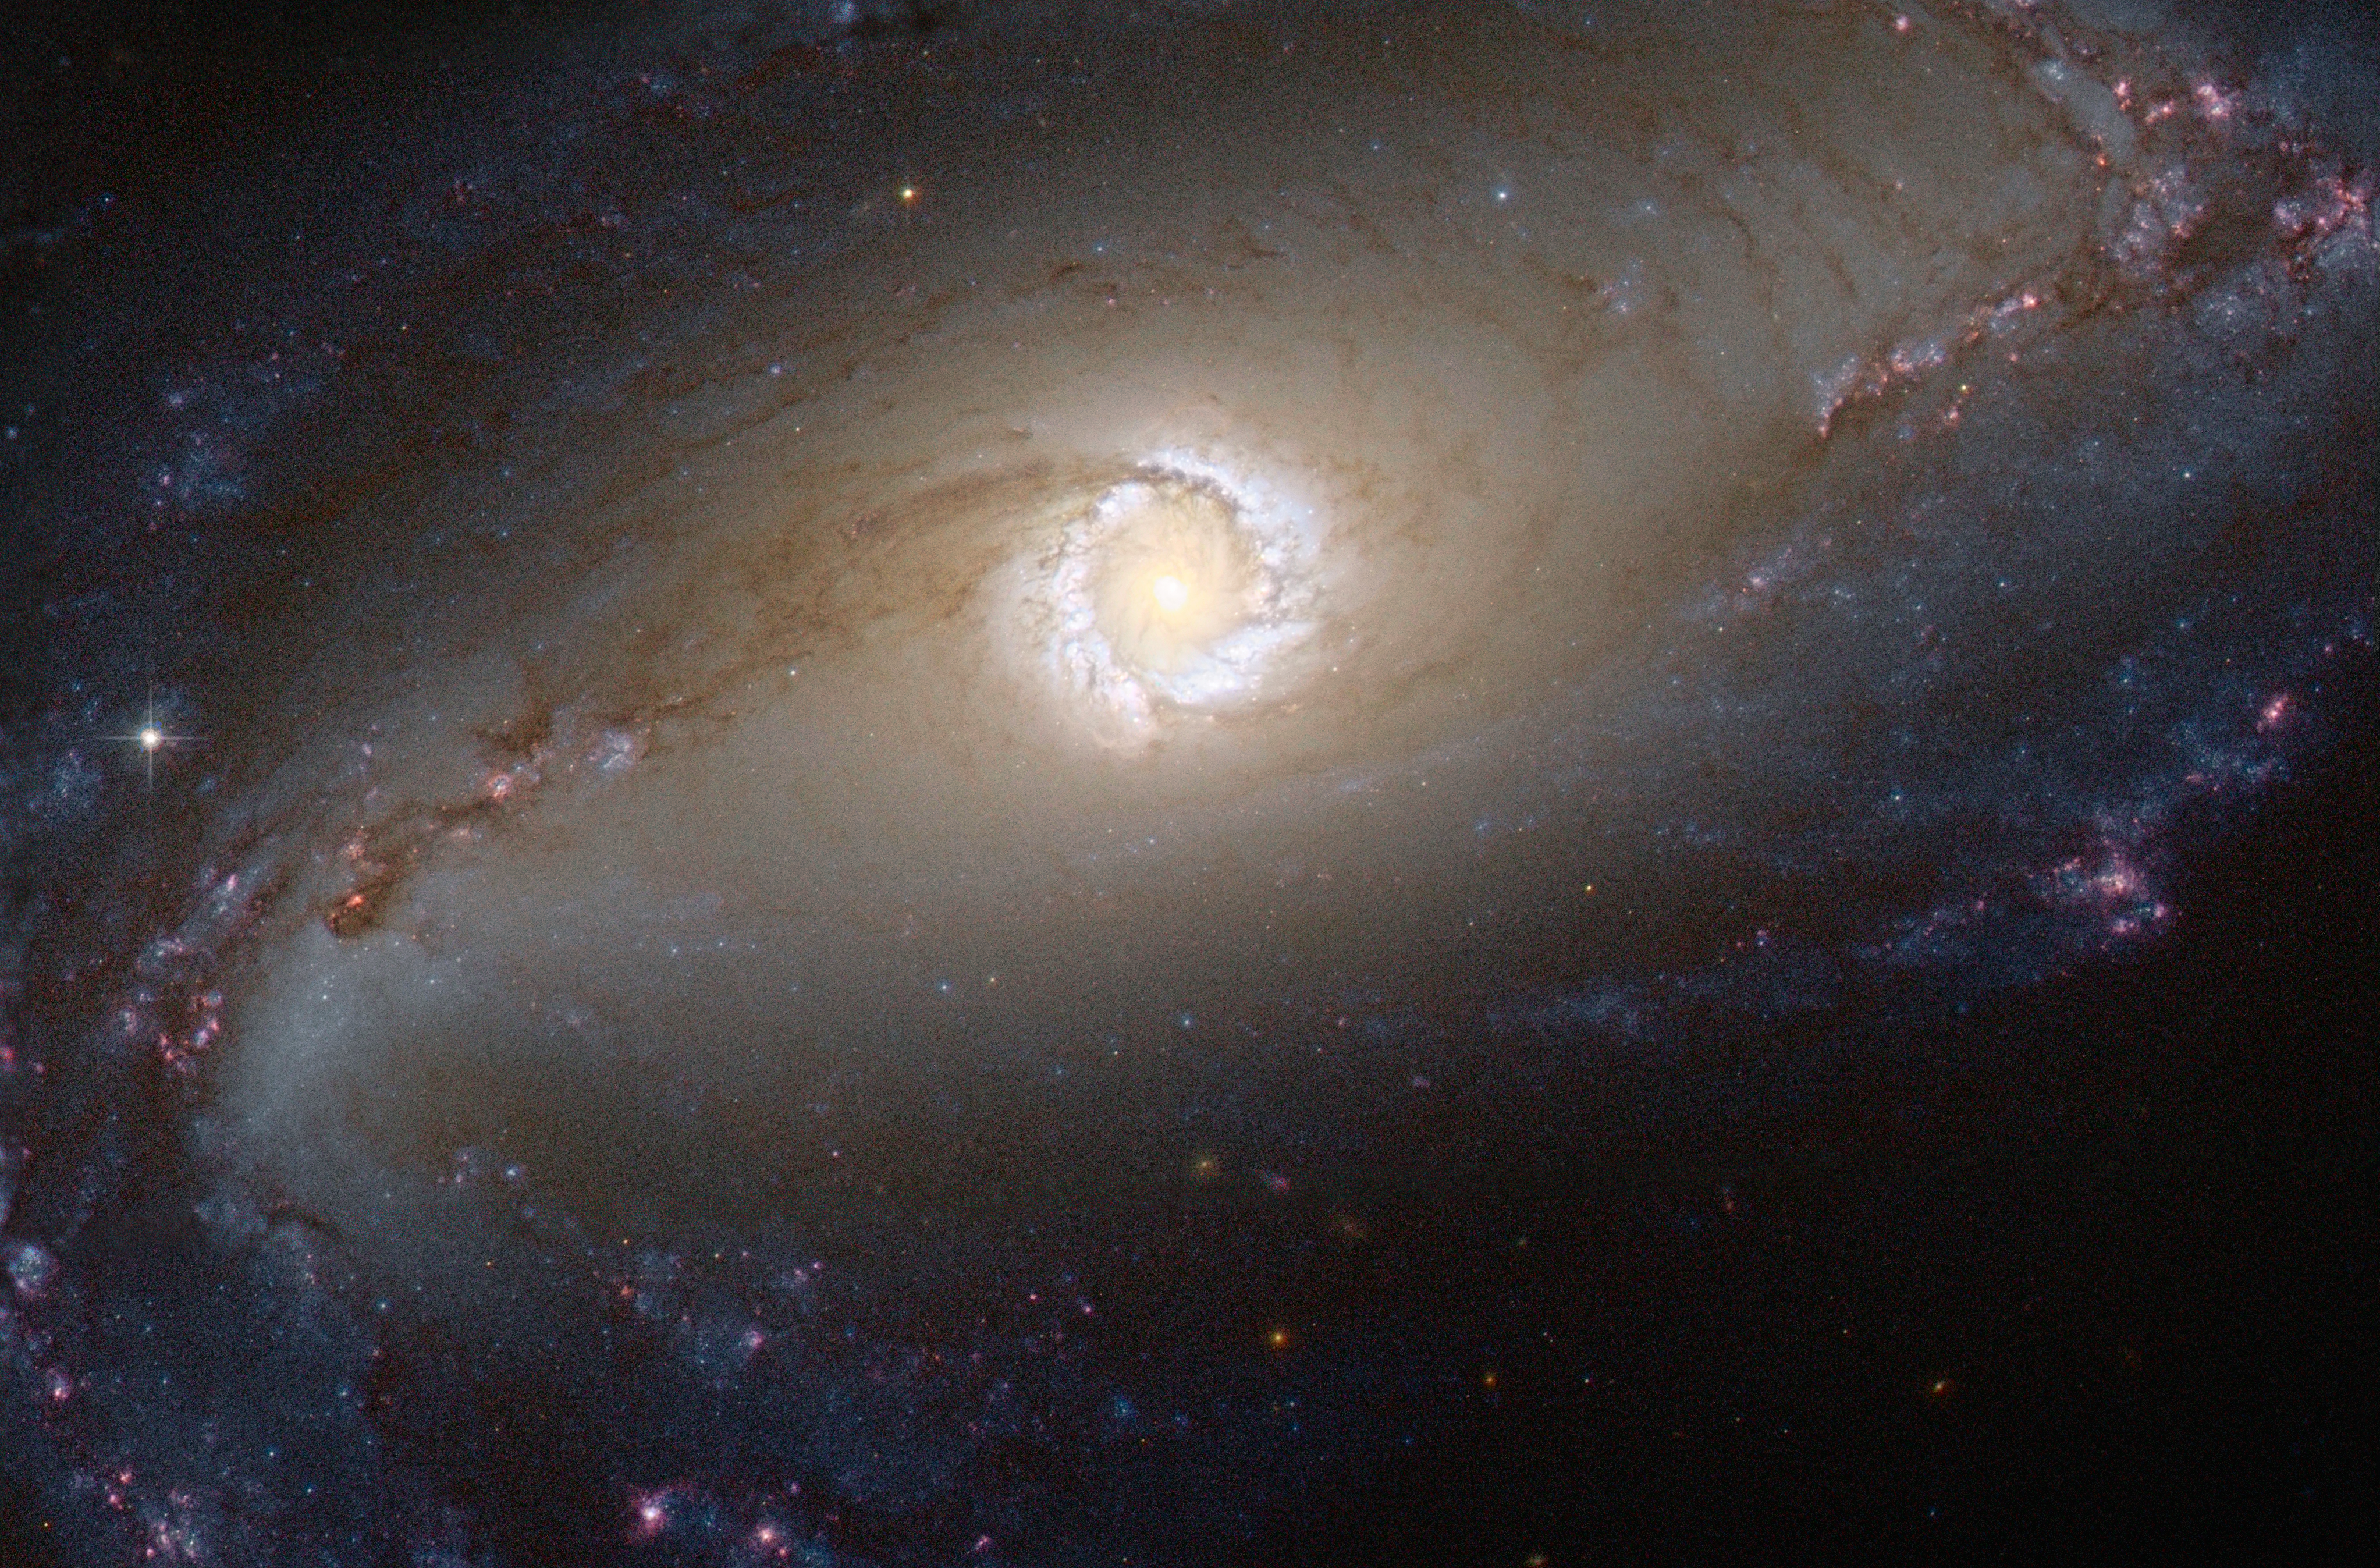

A wanderer dancing the dance of stars and space

The NASA/ESA Hubble Space Telescope provides us this week with a spectacular image of the bright star-forming ring that surrounds the heart of the barred spiral galaxy NGC 1097. In this image, the larger-scale structure of the galaxy is barely visible: its comparatively dim spiral arms, which surround its heart in a loose embrace, reach out beyond the edges of this frame.

This face-on galaxy, lying 45 million light-years away from Earth in the southern constellation of Fornax (The Furnace), is particularly attractive for astronomers. NGC 1097 is a Seyfert galaxy. Lurking at the very centre of the galaxy, a supermassive black hole 100 million times the mass of our Sun is gradually sucking in the matter around it. The area immediately around the black hole shines powerfully with radiation coming from the material falling in.

The distinctive ring around the black hole is bursting with new star formation due to an inflow of material toward the central bar of the galaxy. These star-forming regions are glowing brightly thanks to emission from clouds of ionised hydrogen. The ring is around 5000 light-years across, although the spiral arms of the galaxy extend tens of thousands of light-years beyond it.

NGC 1097 is also pretty exciting for supernova hunters. The galaxy experienced three supernovae (the violent deaths of high-mass stars) in the 11-year span between 1992 and 2003. This is definitely a galaxy worth checking on a regular basis.

However, what it is really exciting about NGC 1097 is that it is not wandering alone through space. It has two small galaxy companions, which dance “the dance of stars and the dance of space” like the gracious dancer of the famous poem The Dancer by Khalil Gibran.

The satellite galaxies are NGC 1097A, an elliptical galaxy orbiting 42 000 light-years from the centre of NGC 1097 and a small dwarf galaxy named NGC 1097B. Both galaxies are located out beyond the frames of this image and they cannot be seen. Astronomers have indications that NGC 1097 and NGC 1097A have interacted in the past.

This picture was taken with Hubble’s Advanced Camera for Surveys using visual and infrared filters.

A version of this image was submitted to the Hubble’s Hidden Treasures image processing competition by contestant Eedresha Sturdivant.

Credit: ESA/Hubble & NASA Acknowledgement: E. Sturdivant